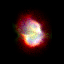

SMP 30 in the Large Magellanic Cloud

In the pictures of the planetary nebulae, colour corresponds to temperature. Blue represents hotter regions of the nebulae and red, cooler. Scientists are probing these illuminated stellar relics in our neighboring galaxy because they are at relatively the same distance - about 168, 000 light-years -- from Earth. Knowing the distance to these objects allows scientists to compare their shapes and sizes, and precisely determine the brightness of their central stars. For this reason, even though these glowing remains of dying stars are about 50 times farther away than the stunning planetary nebulae photographed in the Milky Way, they are of invaluable importance.

Credit: NASA/ESA; L. Stanghellini, R. Shaw, C. Blades, and M. Mutchler, Space Telescope Science Institute, Baltimore, Md.; and B. Balick, University of Washington, Seattle, Wash